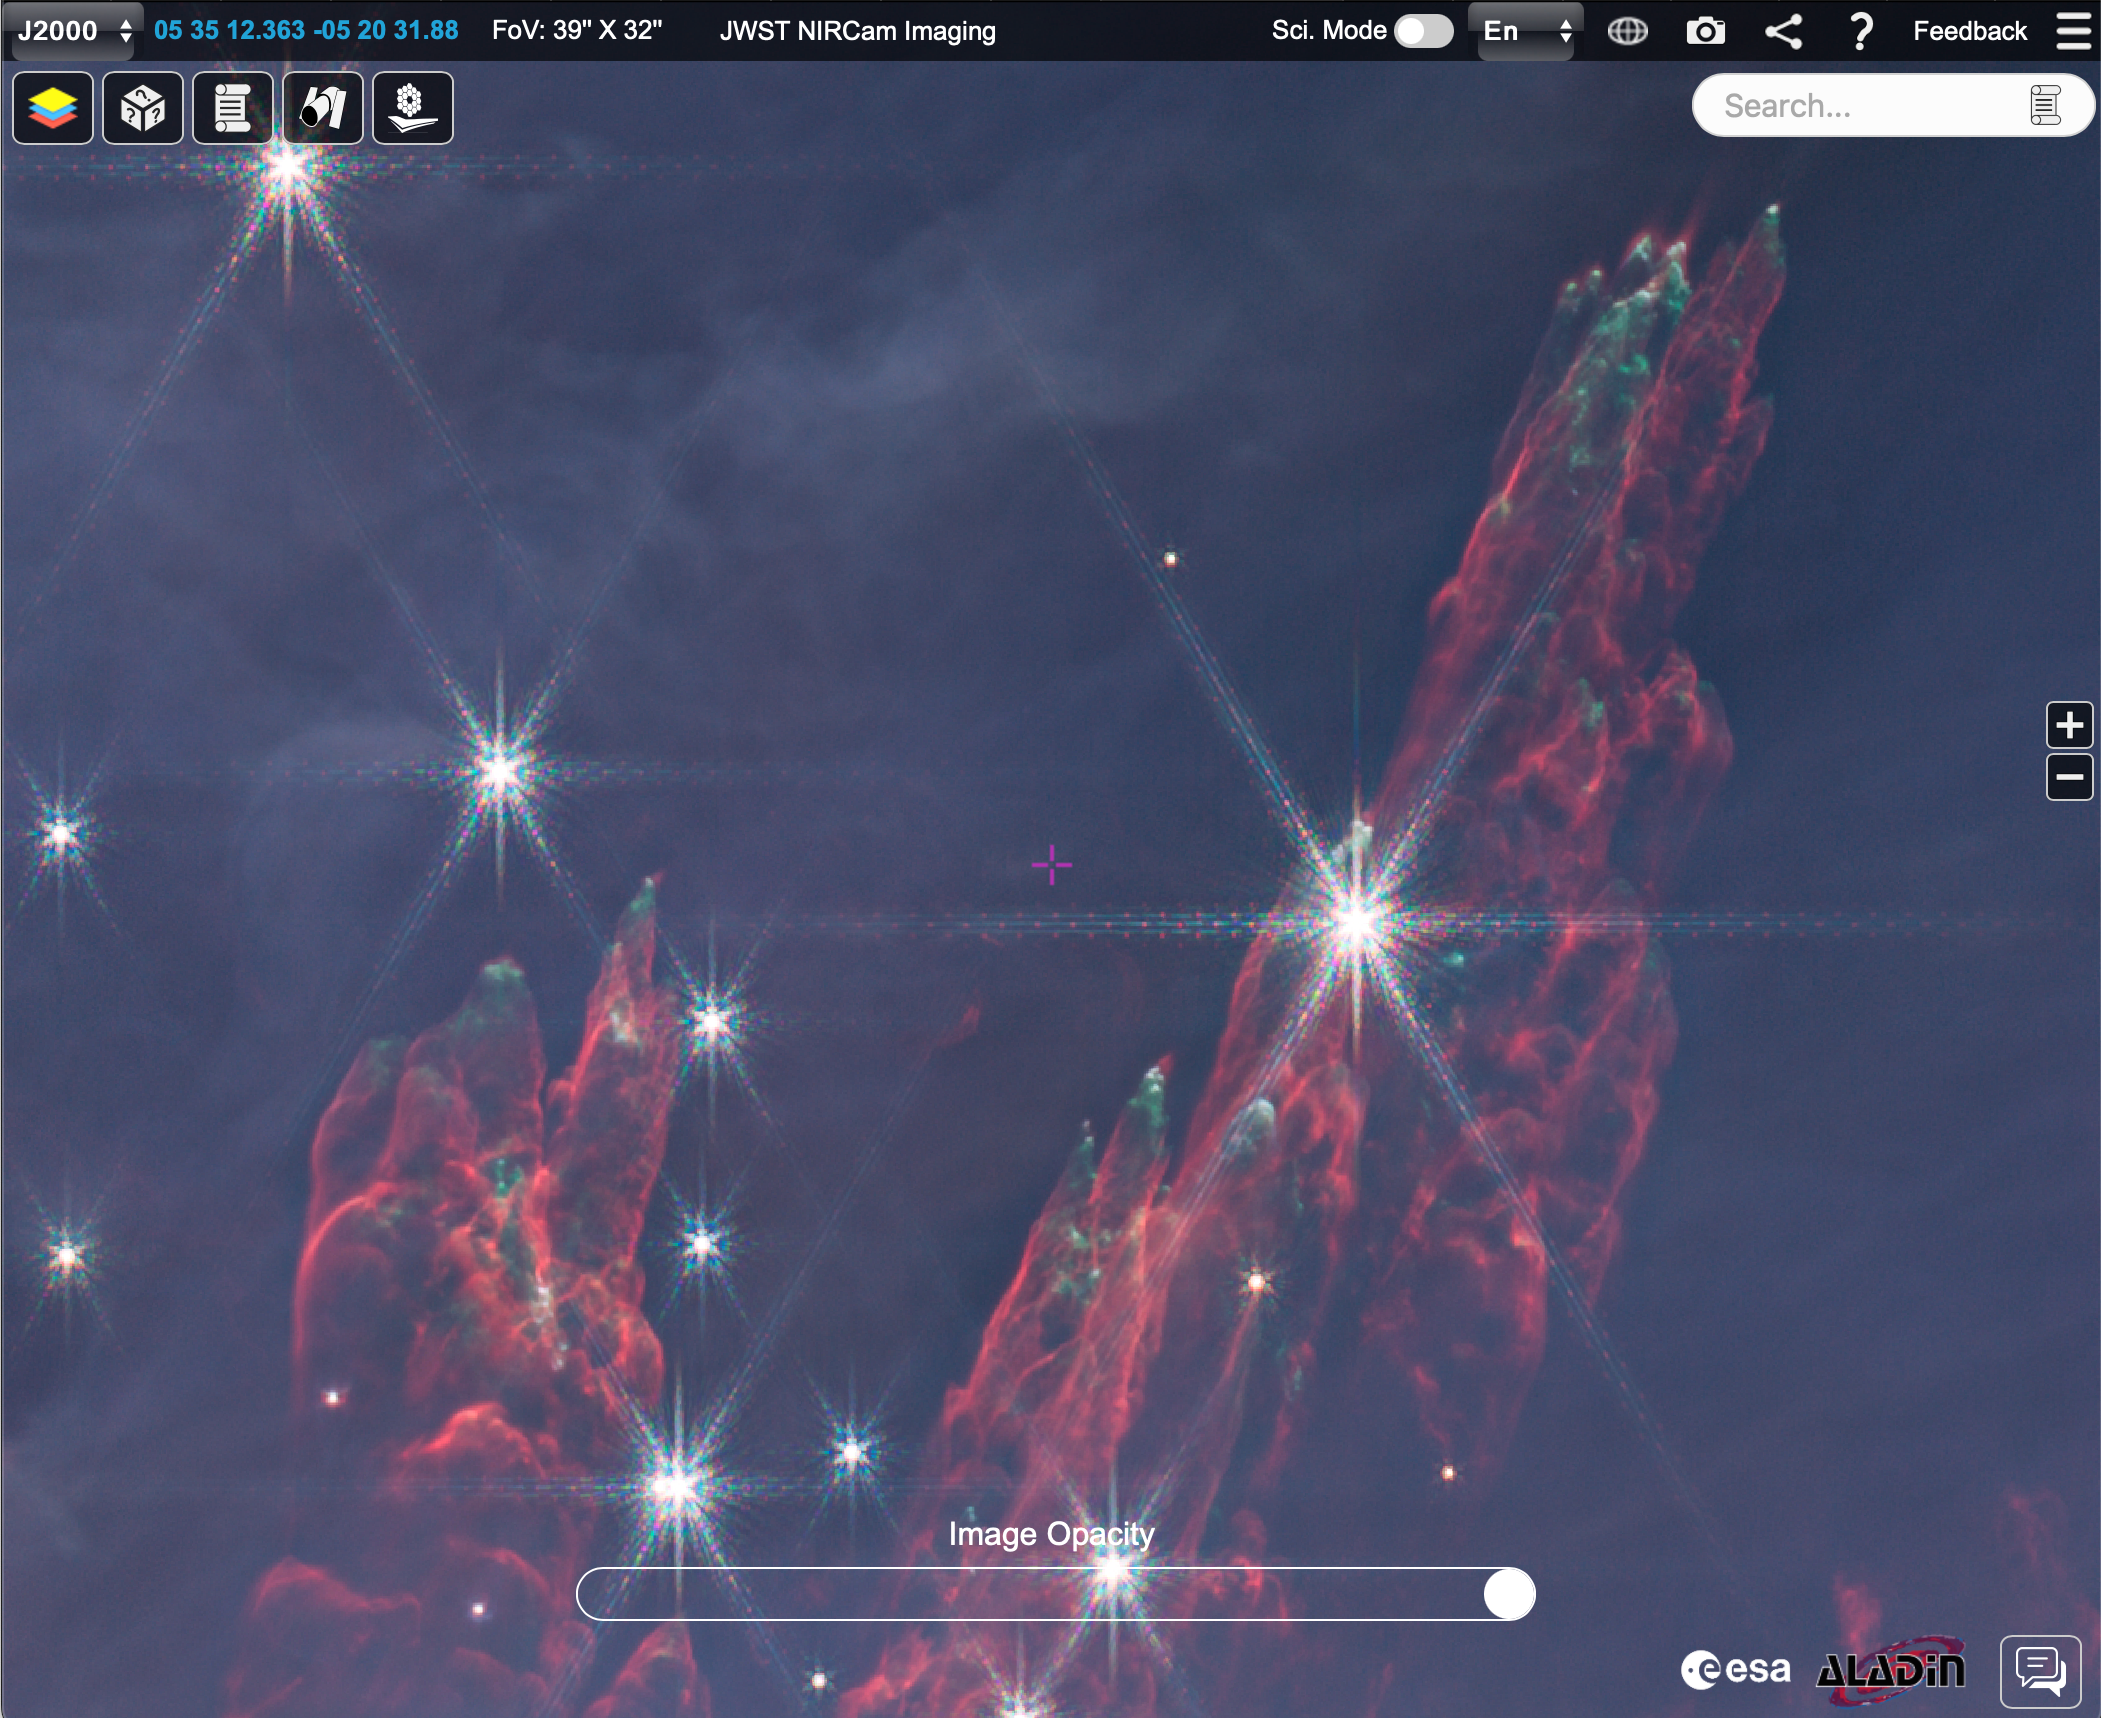

“Fingers” in short-wavelength NIRCam Orion mosaic in ESASky

This is a screenshot from the ESA Sky platform showing some of the ‘fingers’ emanating from the central star-forming `BN-KL’ region in the short-wavelength mosaic behind the Trapezium Cluster and visible Orion Nebula. These fingers are expanding rapidly at hundreds of kilometres per second away from an explosive event that took place in the BN-KL region 500 to 1,000 years ago. They appear red because they emit in shocked molecular hydrogen and the green tips are due to ionised iron. The image can be viewed on ESA Sky here.

Credit: NASA, ESA, CSAScience leads and image processing: M. McCaughrean, S. Pearson